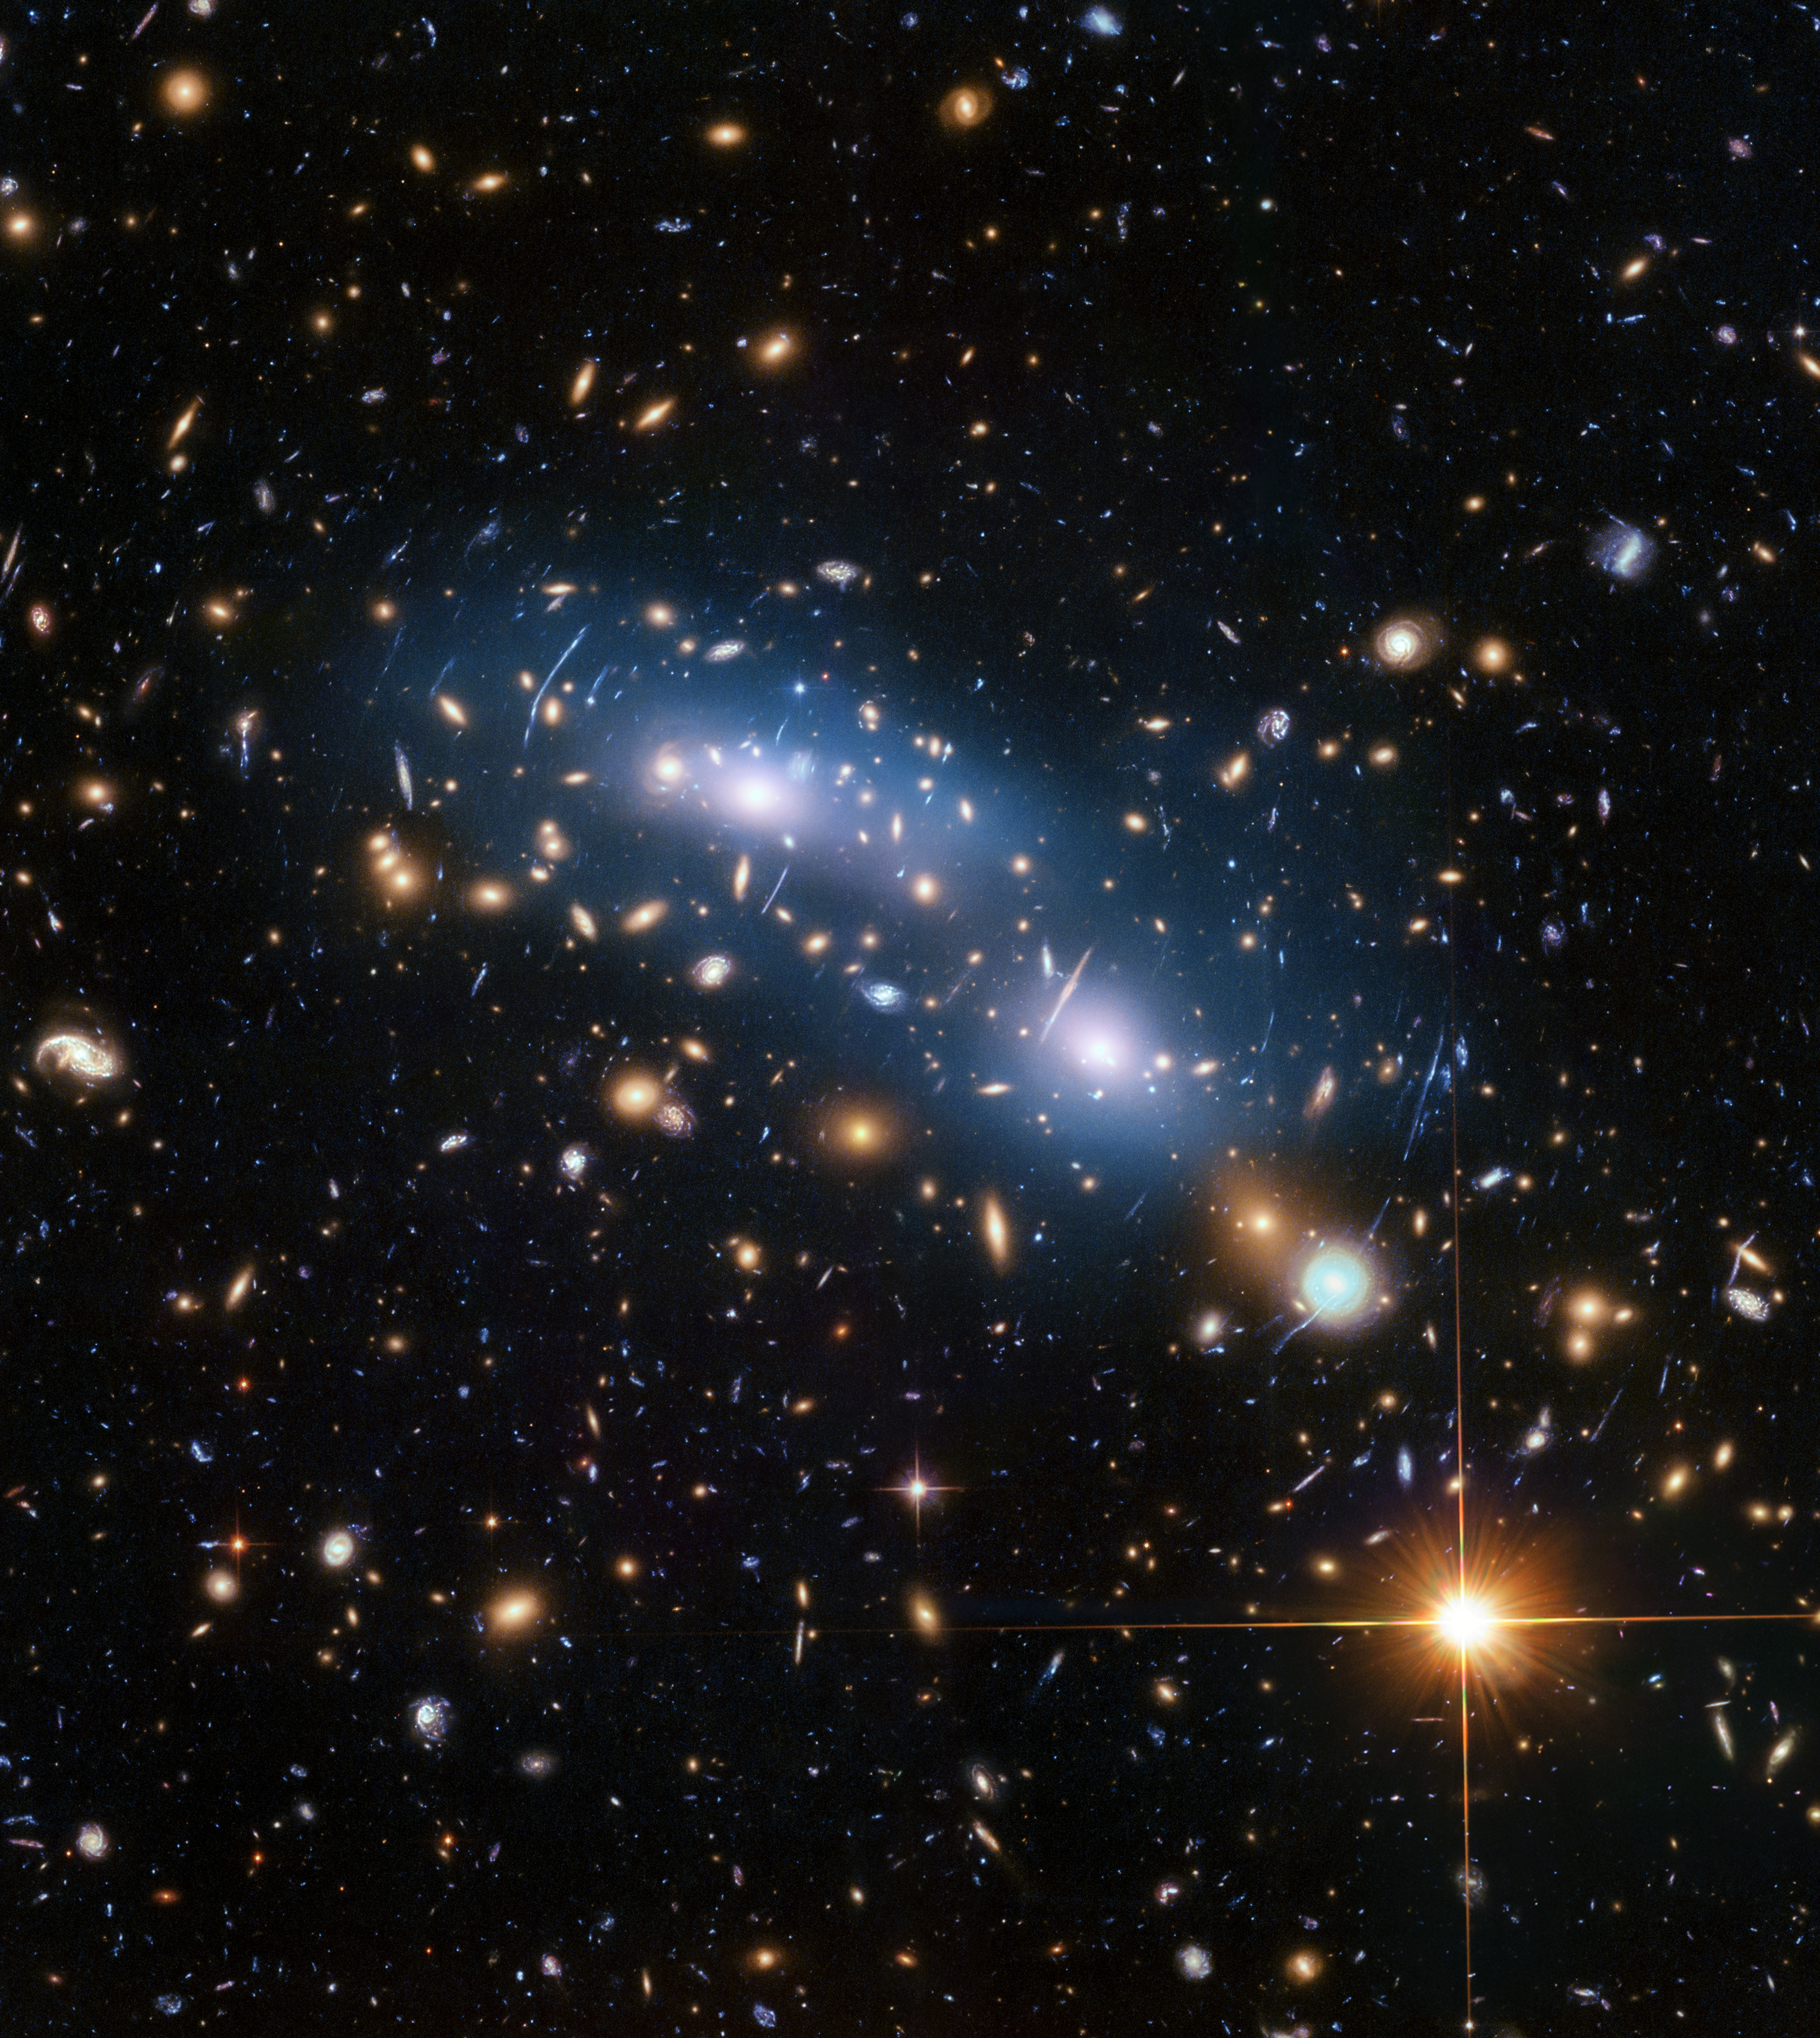

Galaxy Cluster MACSJ0416

This image from the NASA/ESA Hubble Space Telescope shows the galaxy cluster MACS J0416. This is one of six clusters that was studied by the Hubble Frontier Fields programme, which yielded the deepest images of gravitational lensing ever made.

Scientists used intracluster light (visible in blue) to study the distribution of dark matter within the cluster.

Credit: NASA, ESA, and M. Montes (University of New South Wales, Sydney, Australia)